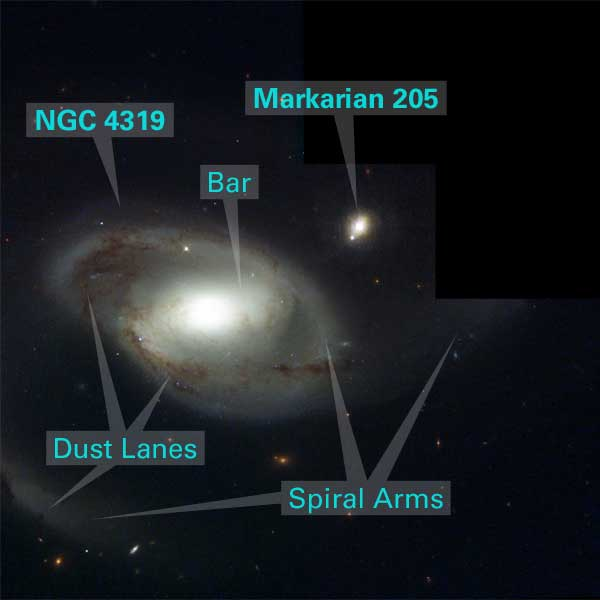

Annotated Image of NGC 4319 and Markarian 205

Appearances can be deceiving. In this NASA/ESA Hubble Space Telescope image, an odd celestial duo, the spiral galaxy NGC 4319 [center] and a quasar called Markarian 205 [upper right], appear to be neighbors. In reality, the two objects don't even live in the same city. They are separated by time and space. NGC 4319 is 80 million light-years from Earth. Markarian 205 (Mrk 205) is more than 14 times farther away, residing 1 billion light-years from Earth. The apparent close alignment of Mrk 205 and NGC 4319 is simply a matter of chance.

Credit: NASA/ESA and Z. Levay (STScI)